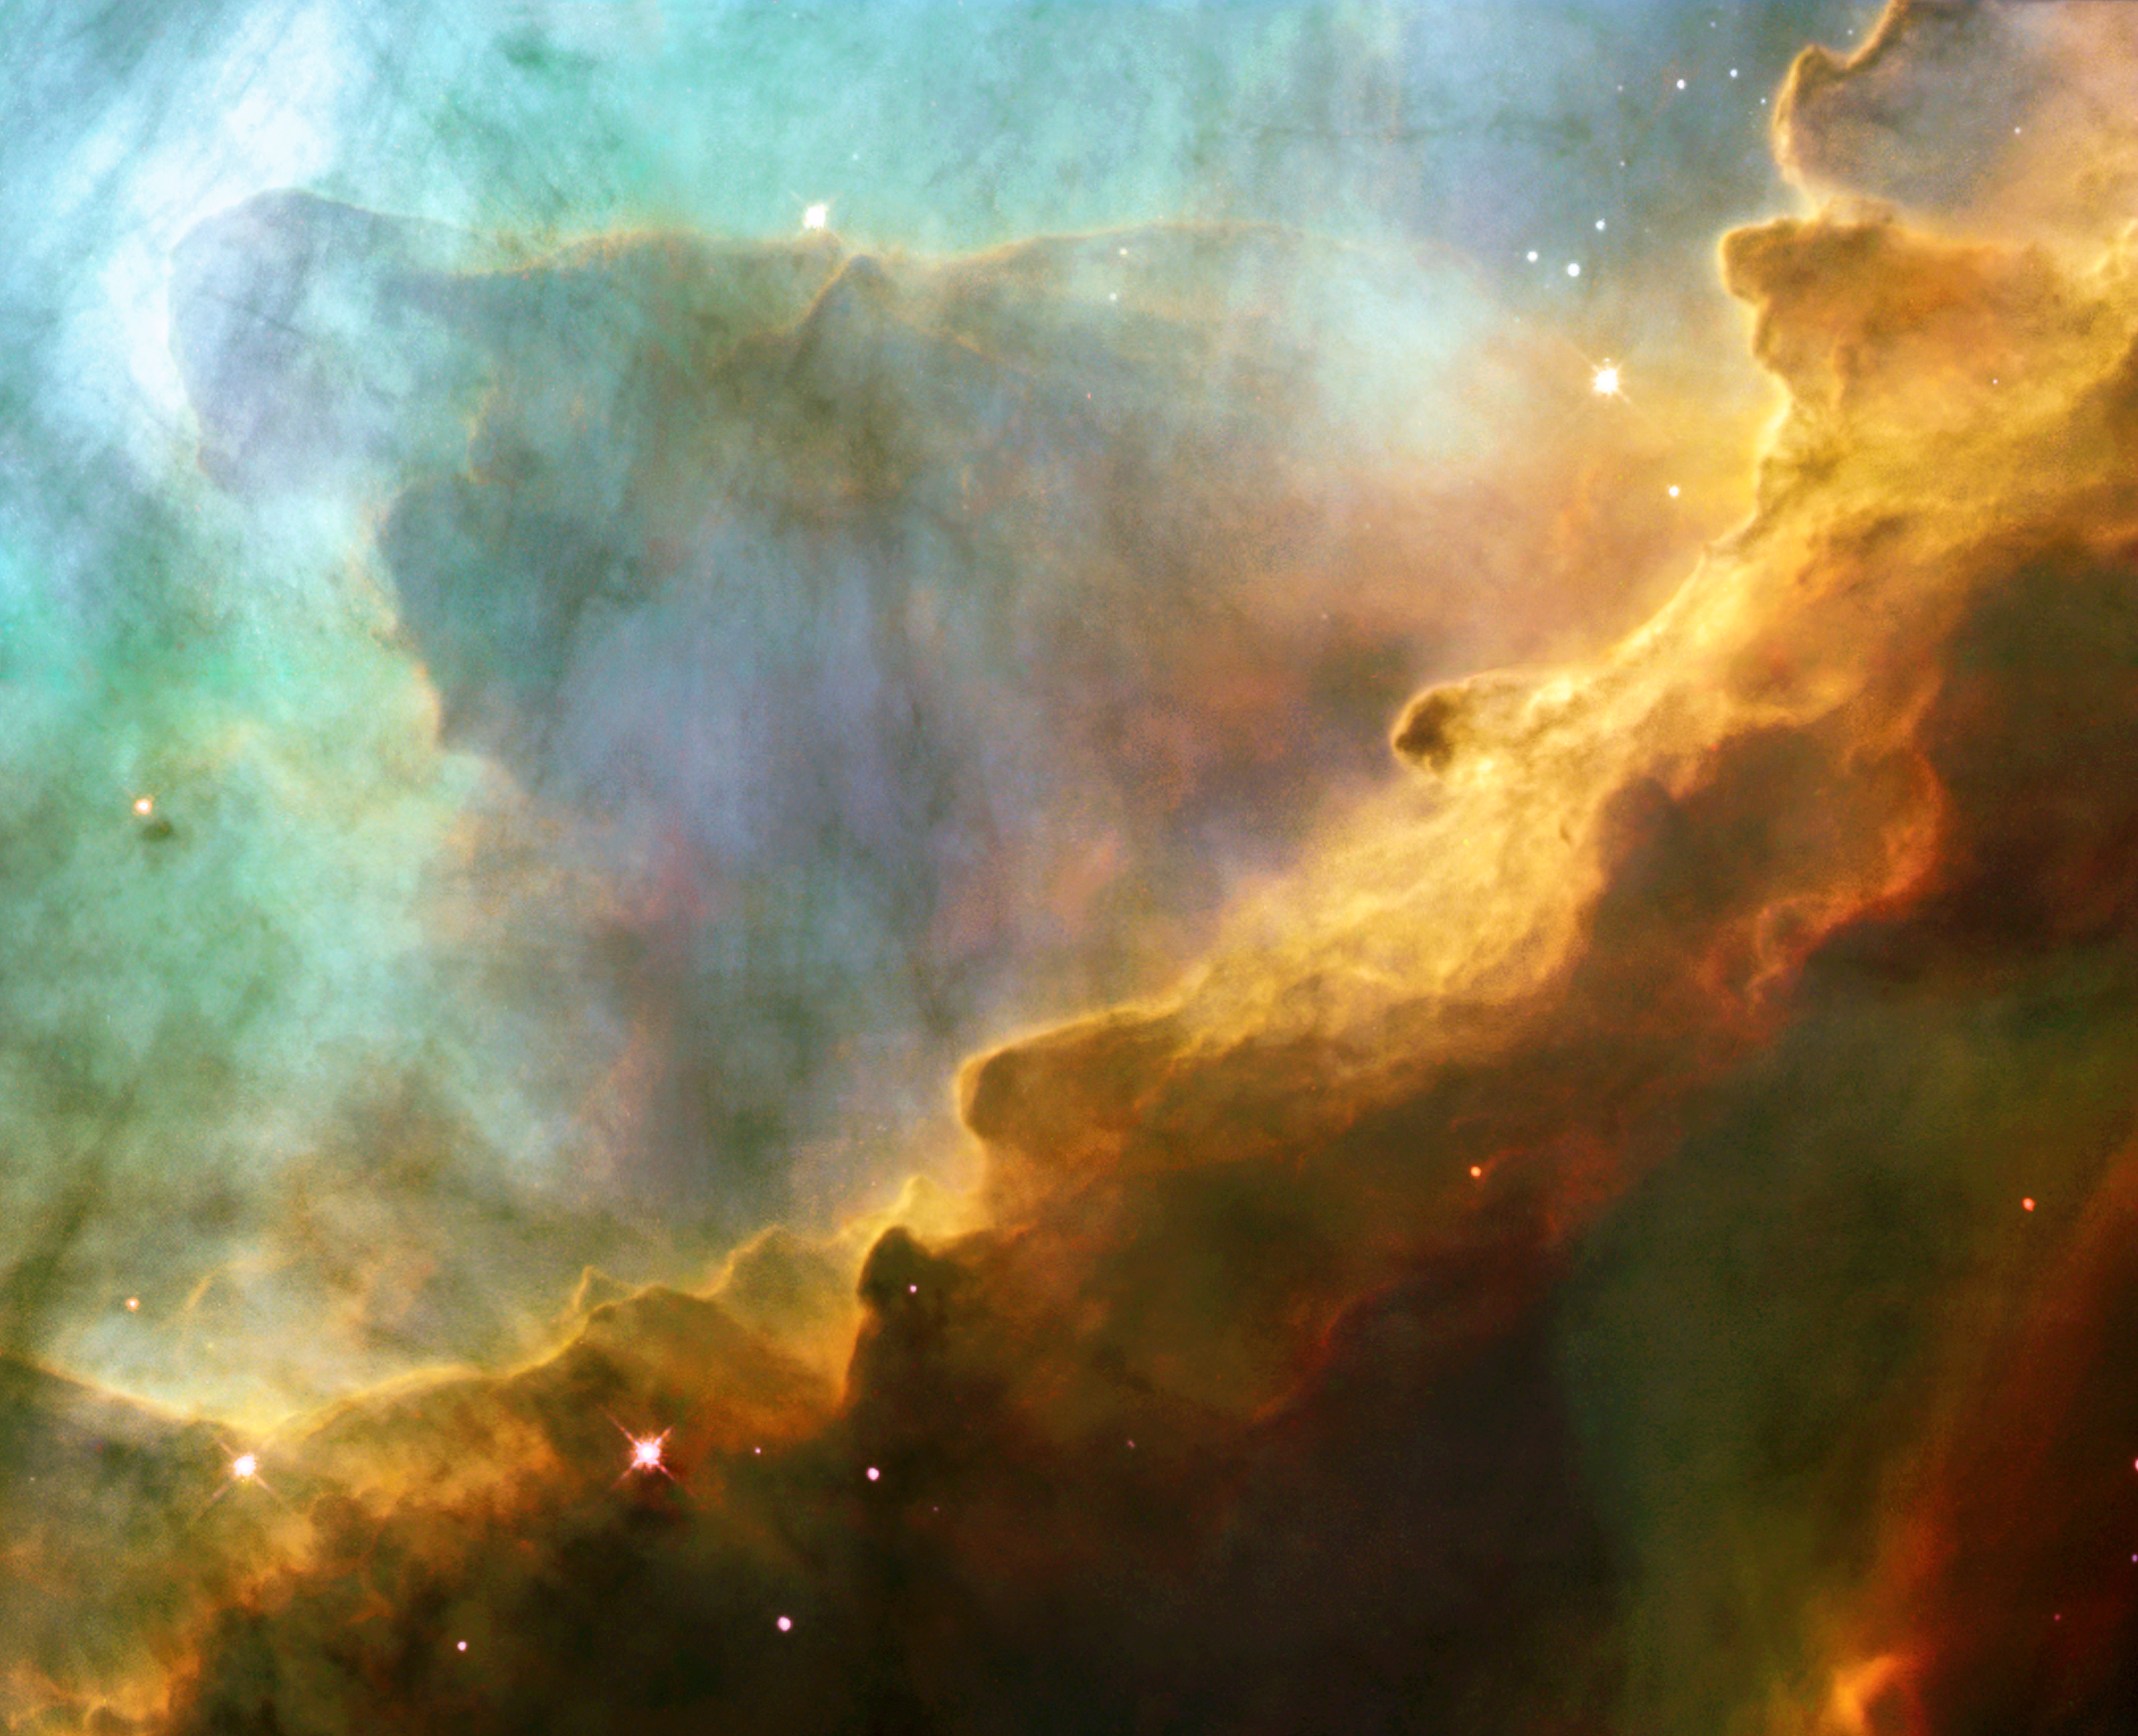

A perfect storm of turbulent gases

Like the fury of a raging sea, this anniversary image from the NASA/ESA Hubble Space Telescope shows a bubbly ocean of glowing hydrogen, oxygen, and sulphur gas in the extremely massive and luminous molecular nebula Messier 17. This Hubble photograph captures a small region within Messier 17 (M17), a hotbed of star formation. M17, also known as the Omega or Swan Nebula, is located about 5500 light-years away in the Sagittarius constellation. The release of this image commemorates the thirteenth anniversary of Hubble's launch on 24 April 1990. The wave-like patterns of gas have been sculpted and illuminated by a torrent of ultraviolet radiation from young, massive stars (which lie outside the picture to the upper left). The glow of these patterns highlights the 3D structure of the gases. The ultraviolet radiation is carving and heating the surfaces of cold hydrogen gas clouds. The warmed surfaces glow orange and red in this image. The intense heat and pressure cause some material to stream away from the surface, creating the glowing veil of even hotter green-coloured gas that masks background structures. The pressure on the tips of the waves may trigger new star formation within them. The image, roughly 3 light-years across, was taken on 29-30 May 1999, with Hubble's Wide Field Planetary Camera 2. The colours in the image represent various gases. Red represents sulphur; green, hydrogen; and blue, oxygen.

Credit: European Space Agency, NASA, and J. Hester (Arizona State University)